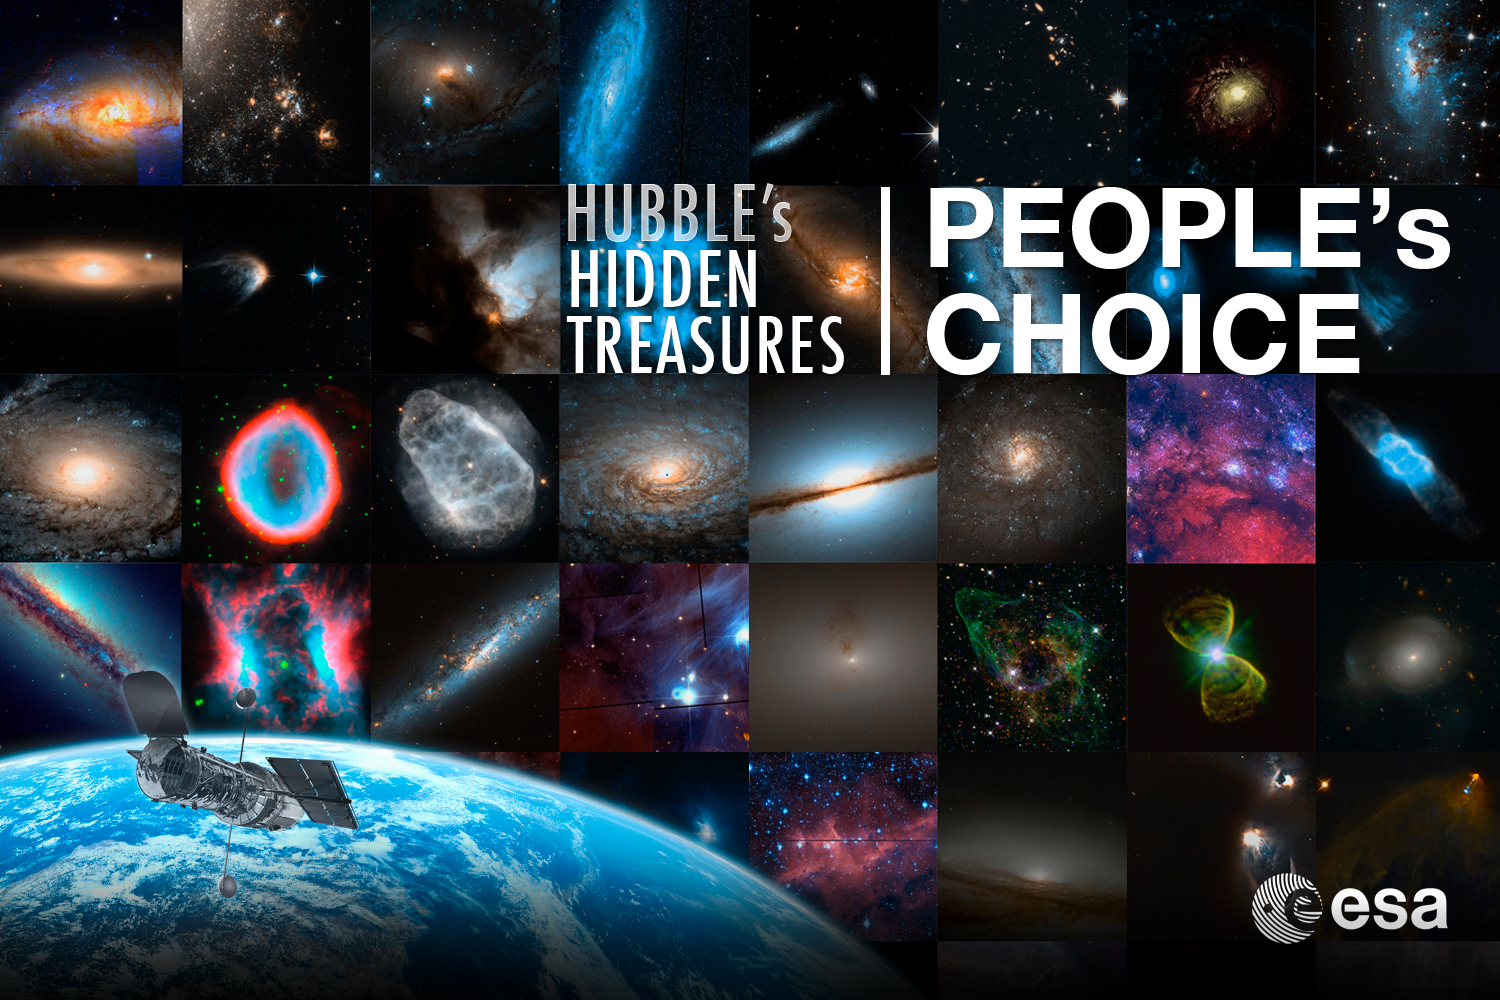

Hidden Treasures competition public vote announced

The Hubble’s Hidden Treasures competition brought in nearly 3000 entries. Now it’s time for you to have your say. The best images from both categories (simple and advanced) can be seen and voted on. The winners in each category will receive an aluminium-mounted Hubble image.

Credit: ESA/Hubble